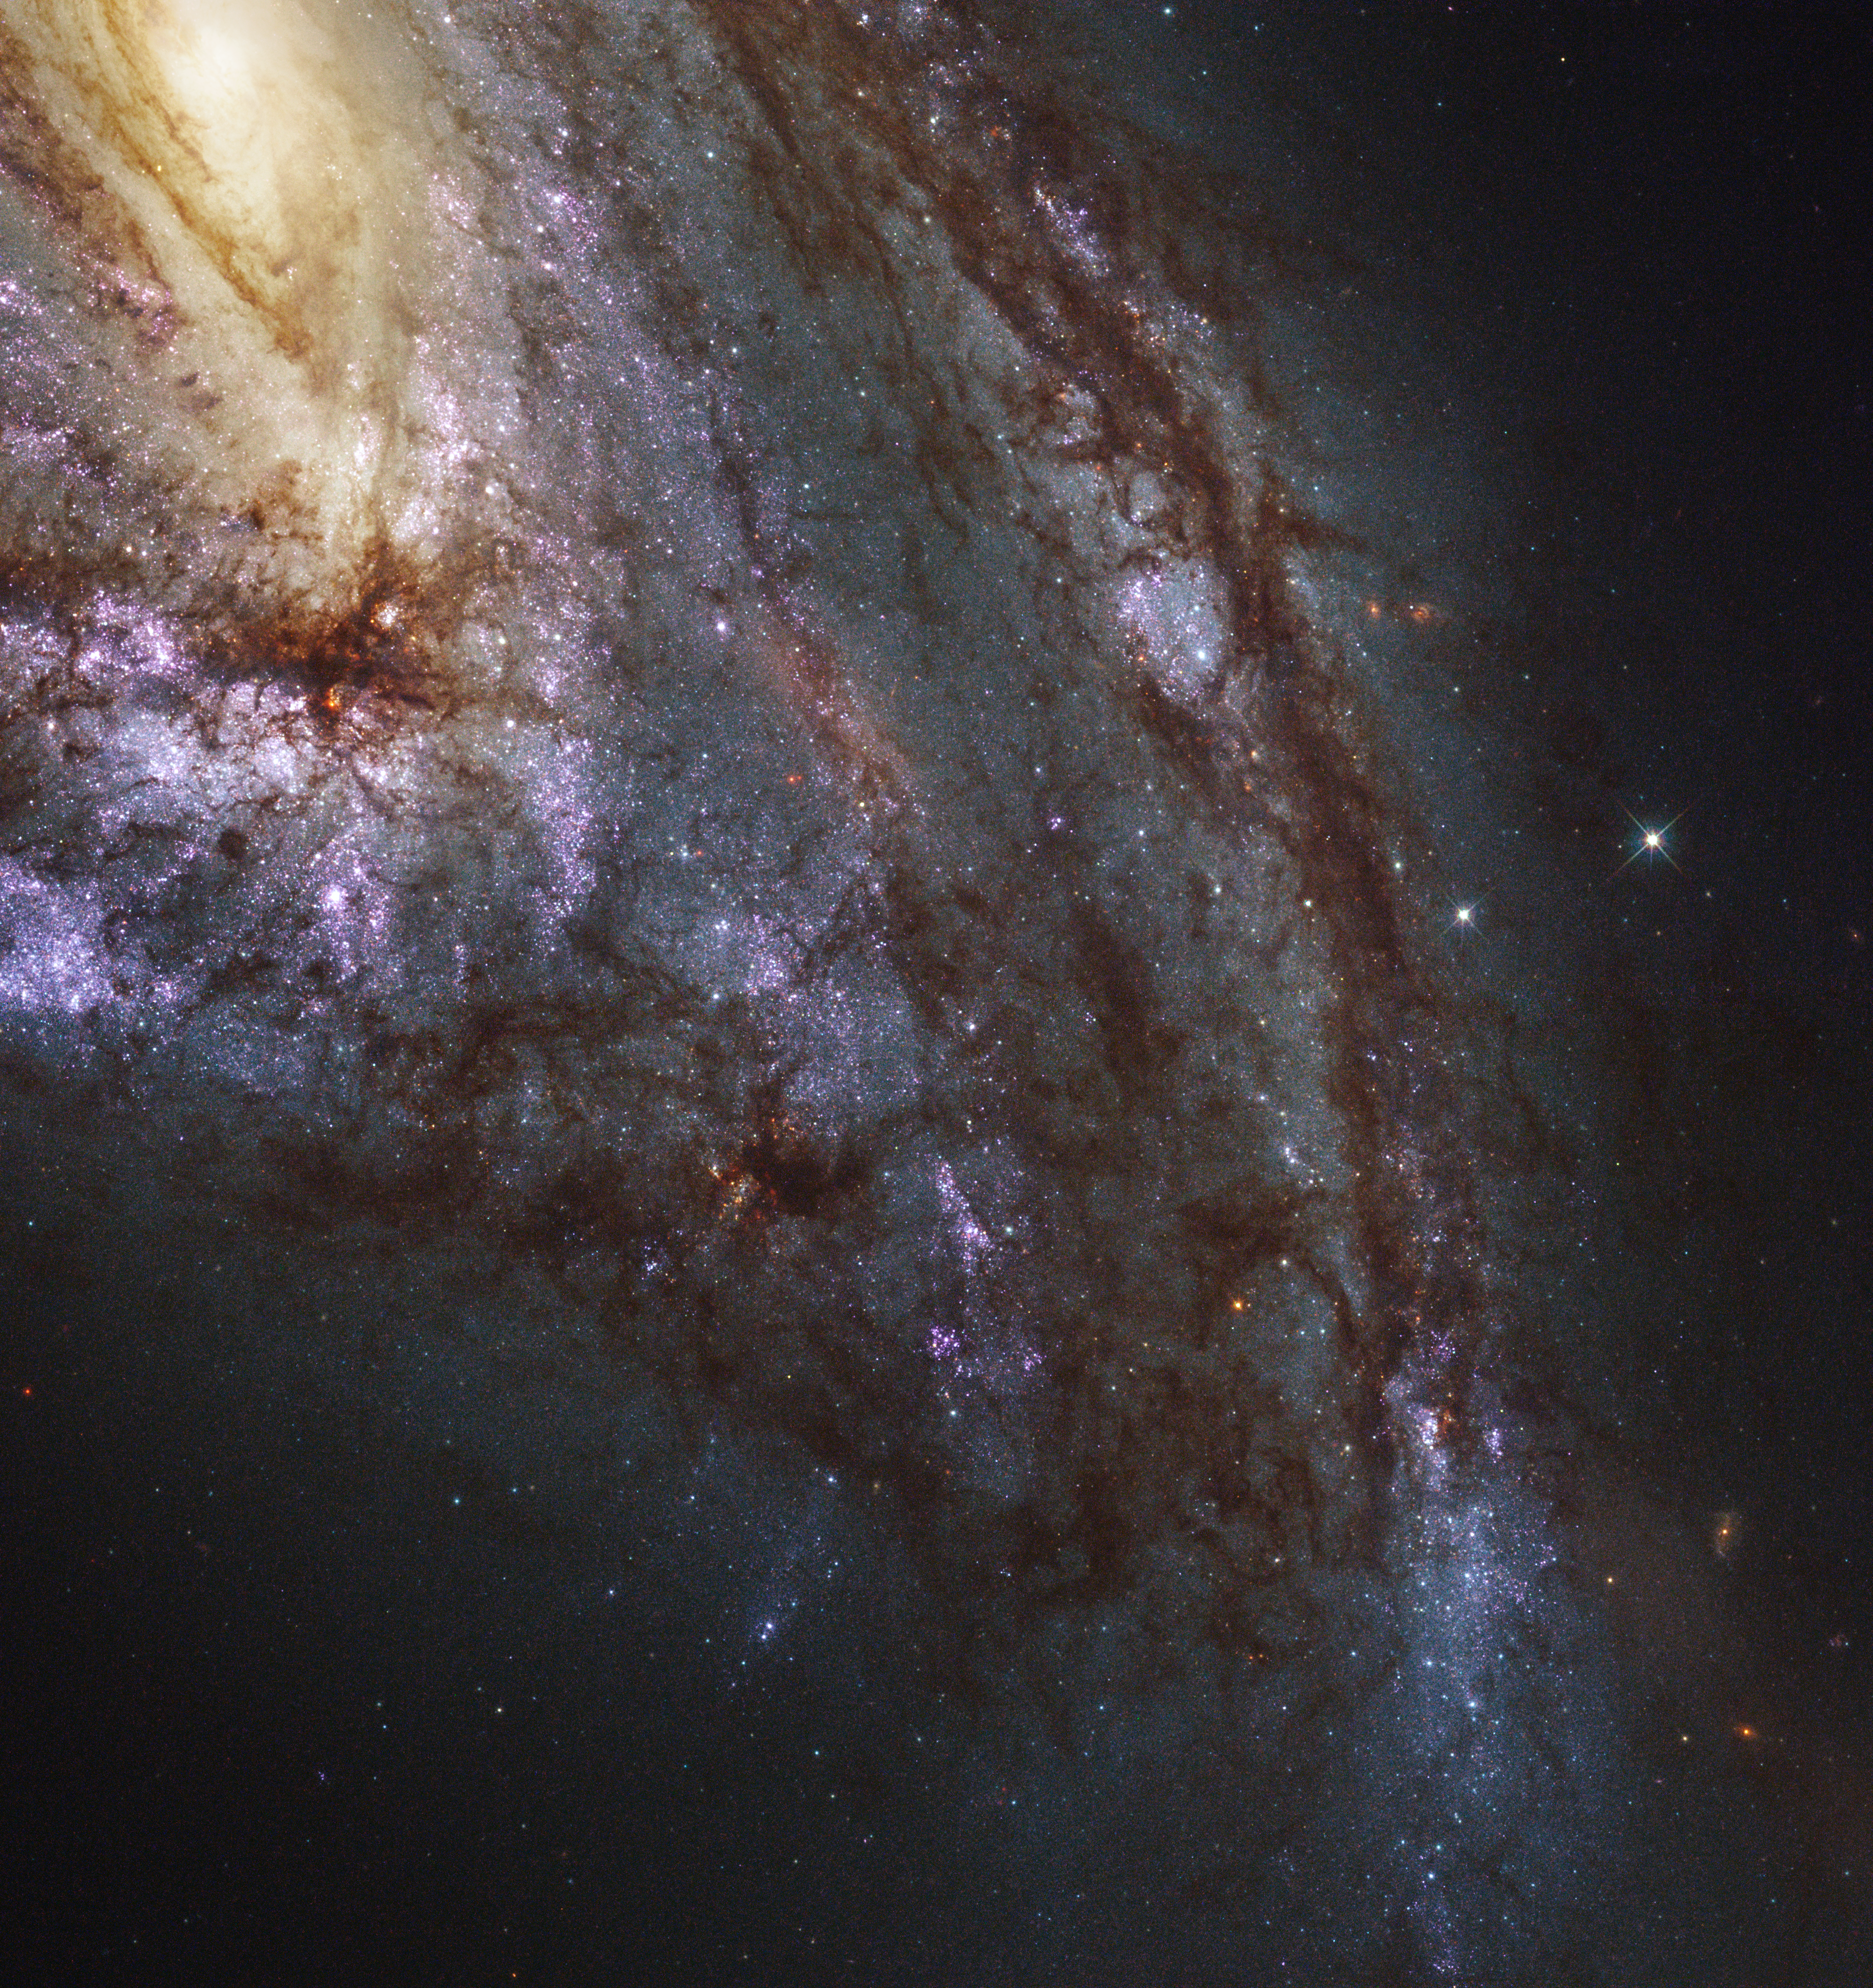

Messier 66 — member of the Leo Triplet

The spiral galaxy Messier 66 is located at a distance of about 35 million light-years in the constellation of Leo (The Lion). Together with Messier 65 and NGC 3628, Messier 66 is a member of the Leo Triplet, a trio of interacting spiral galaxies.

Like all the galaxies in LEGUS, Messier 66 is undergoing vigorous star and star-cluster formation. One of the goals of LEGUS is to sample star-forming regions across each galaxy. Because the galaxies are relatively close to Earth, Hubble can resolve individual stars.

An image of this galaxy was already released back in 2010 (heic1006). This newly-processed image now also shows ultraviolet radiation Hubble captured from the galaxy.

Credit: NASA, ESA, and the LEGUS team